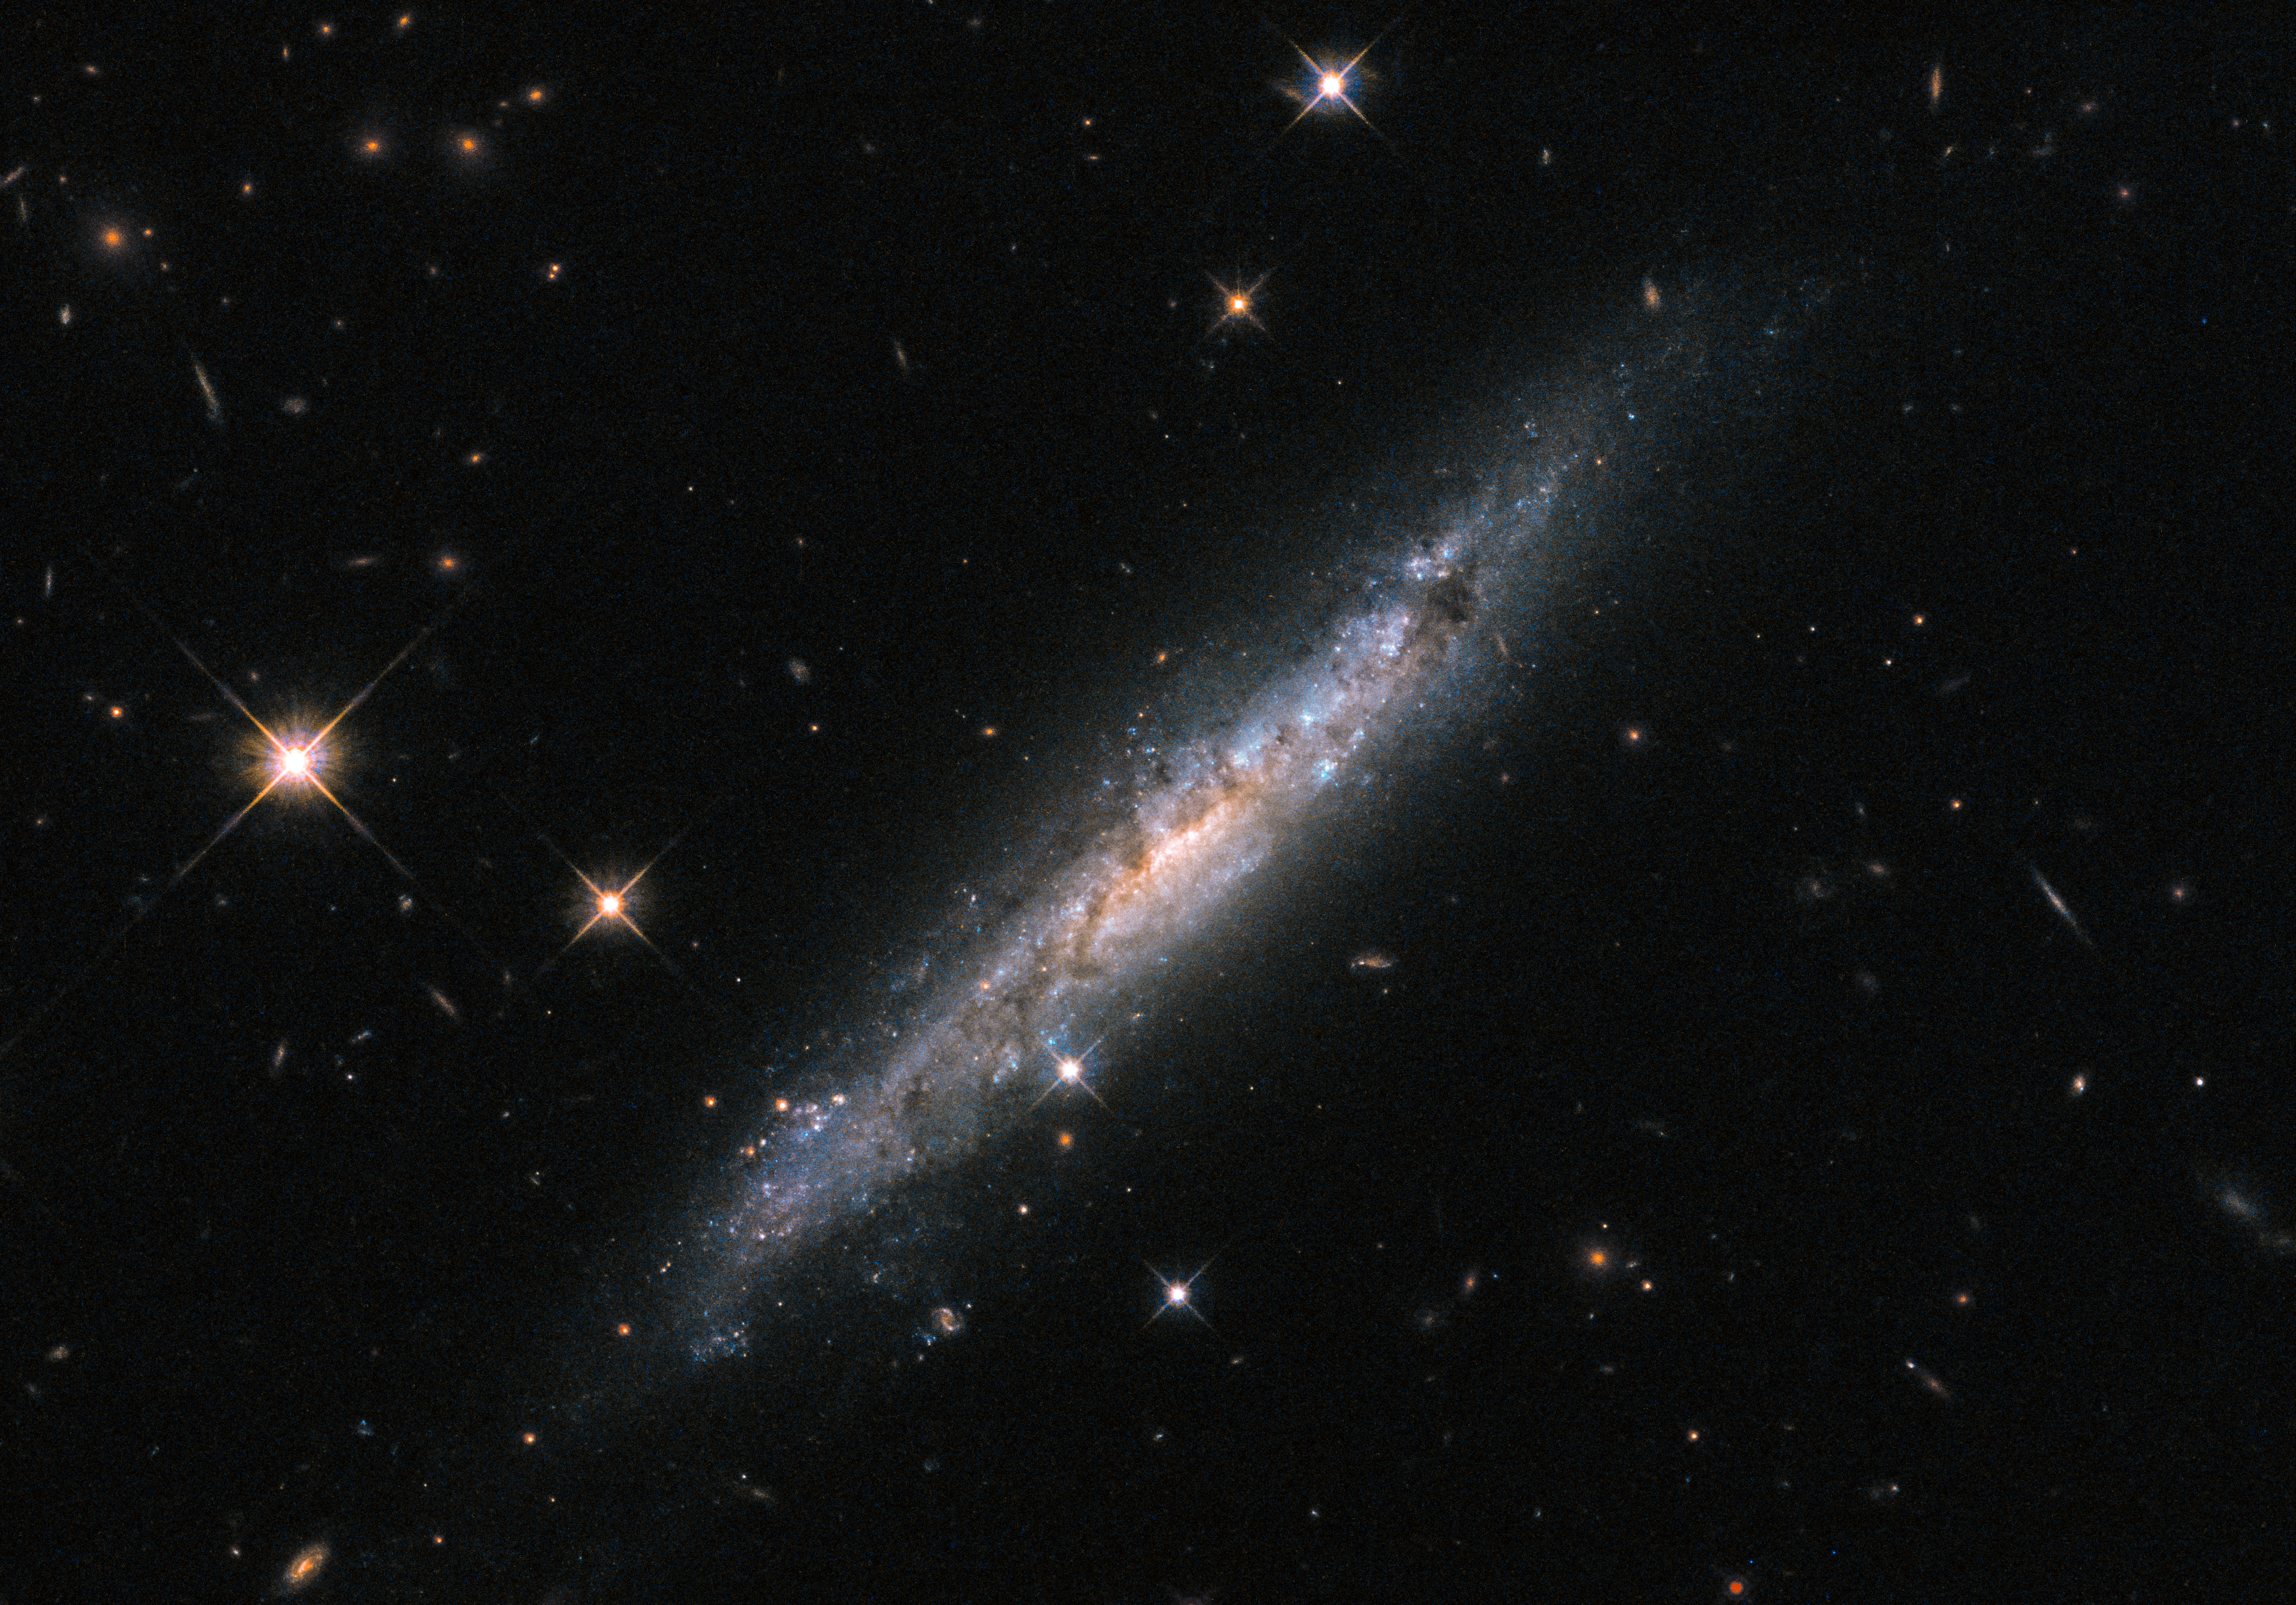

Explosive tendencies

Don’t be fooled! The subject of this Picture of the Week, ESO 580-49, may seem tranquil and unassuming, but this spiral galaxy actually displays some explosive tendencies.

In October of 2011, a cataclysmic burst of high-energy gamma-ray radiation — known as a gamma-ray burst, or GRB — was detected coming from the region of sky containing ESO 580-49. Astronomers believe that the galaxy was the host of the GRB, given that the chance of a coincidental alignment between the two is roughly 1 in 10 million. At a distance of around 185 million light-years from Earth, it was the second-closest gamma-ray burst (GRB) ever detected.

Gamma-ray bursts are among the brightest events in the cosmos, occasionally outshining the combined gamma-ray output of the entire observable Universe for a few seconds. The exact cause of the GRB that probably occurred within this galaxy, catalogued as GRB 111005A, remains a mystery. Several events are known to lead to GRBs, but none of these explanations appear to fit the bill in this case. Astronomers have therefore suggested that ESO 580-49 hosted a new type of GRB explosion — one that has not yet been characterised.

Credit: ESA/Hubble & NASA